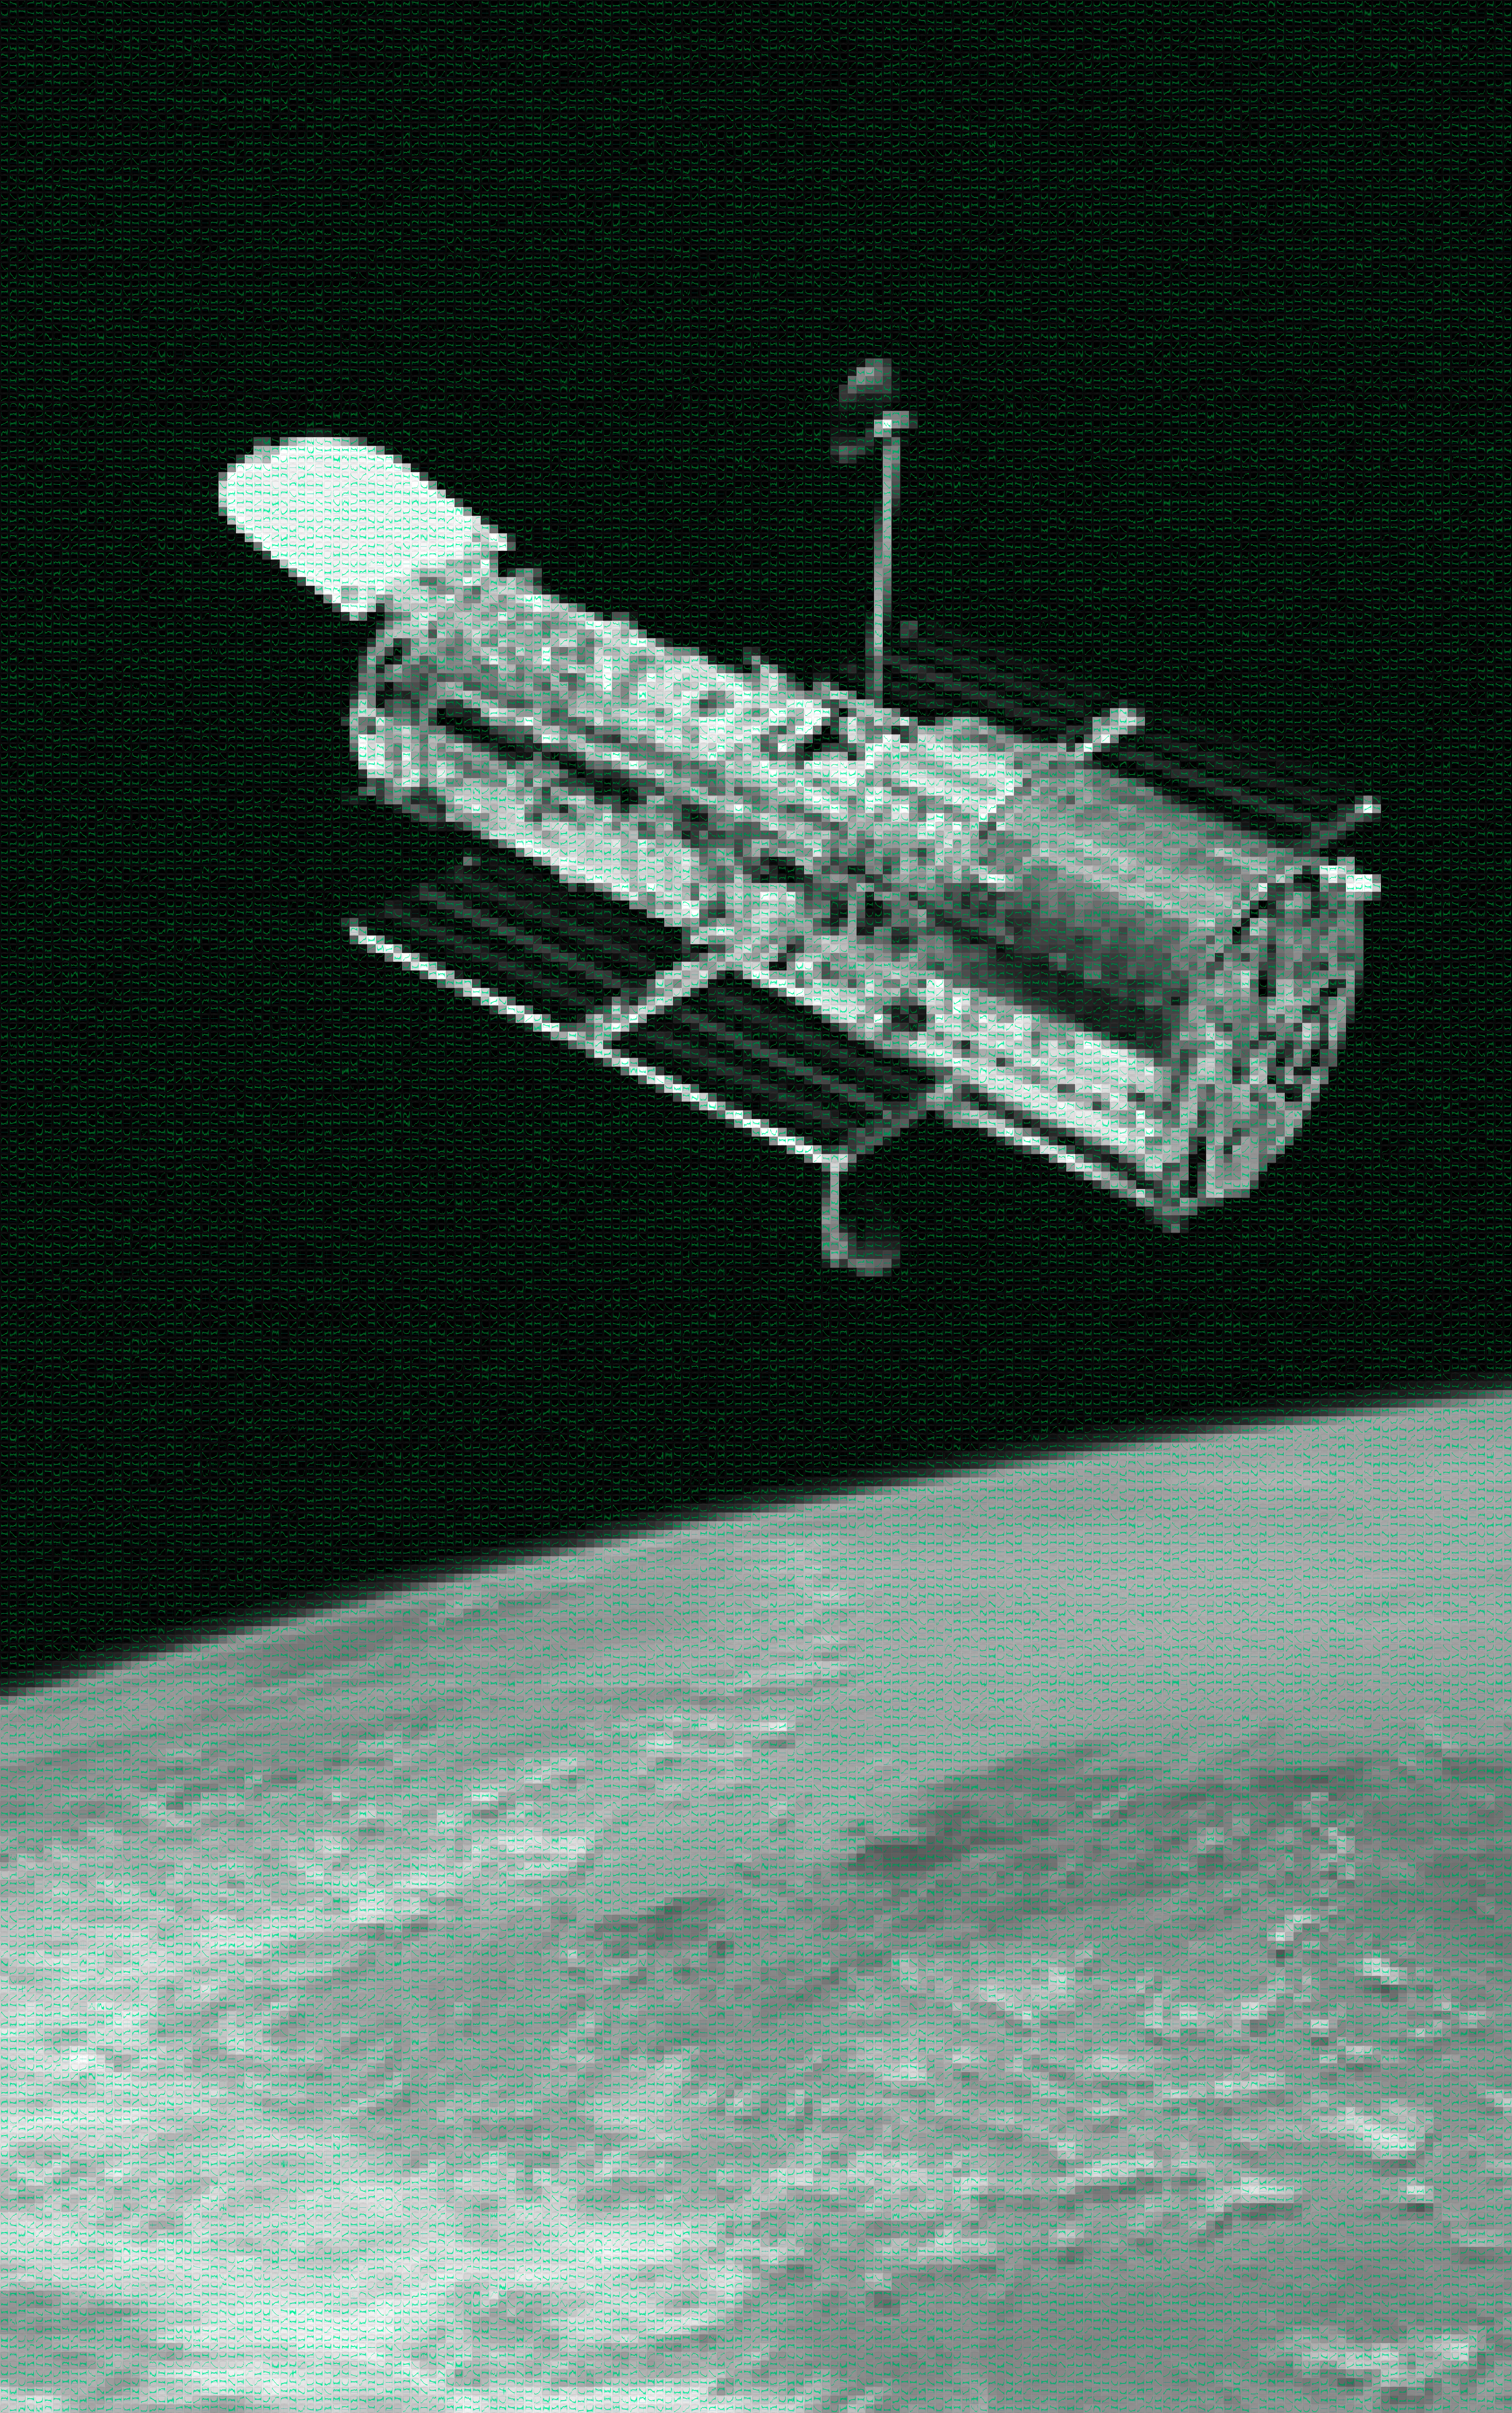

Hubble with spectra from the Space Telescope European Coordinating Facility

This image of Hubble is made up of a mosaic of over 47 000 unique slitless spectra, which have been processed and studied at the Space Telescope European Coordinating Facility (ST-ECF). They represent the emissions of a wide range of astronomical objects, ranging from stars to galaxies. The ST-ECF, which is closing at the end of 2010, after 26 years of successful operation, has pioneered the process of slitless spectroscopy from which these spectra are derived.

Credit: ESA/ST-ECF